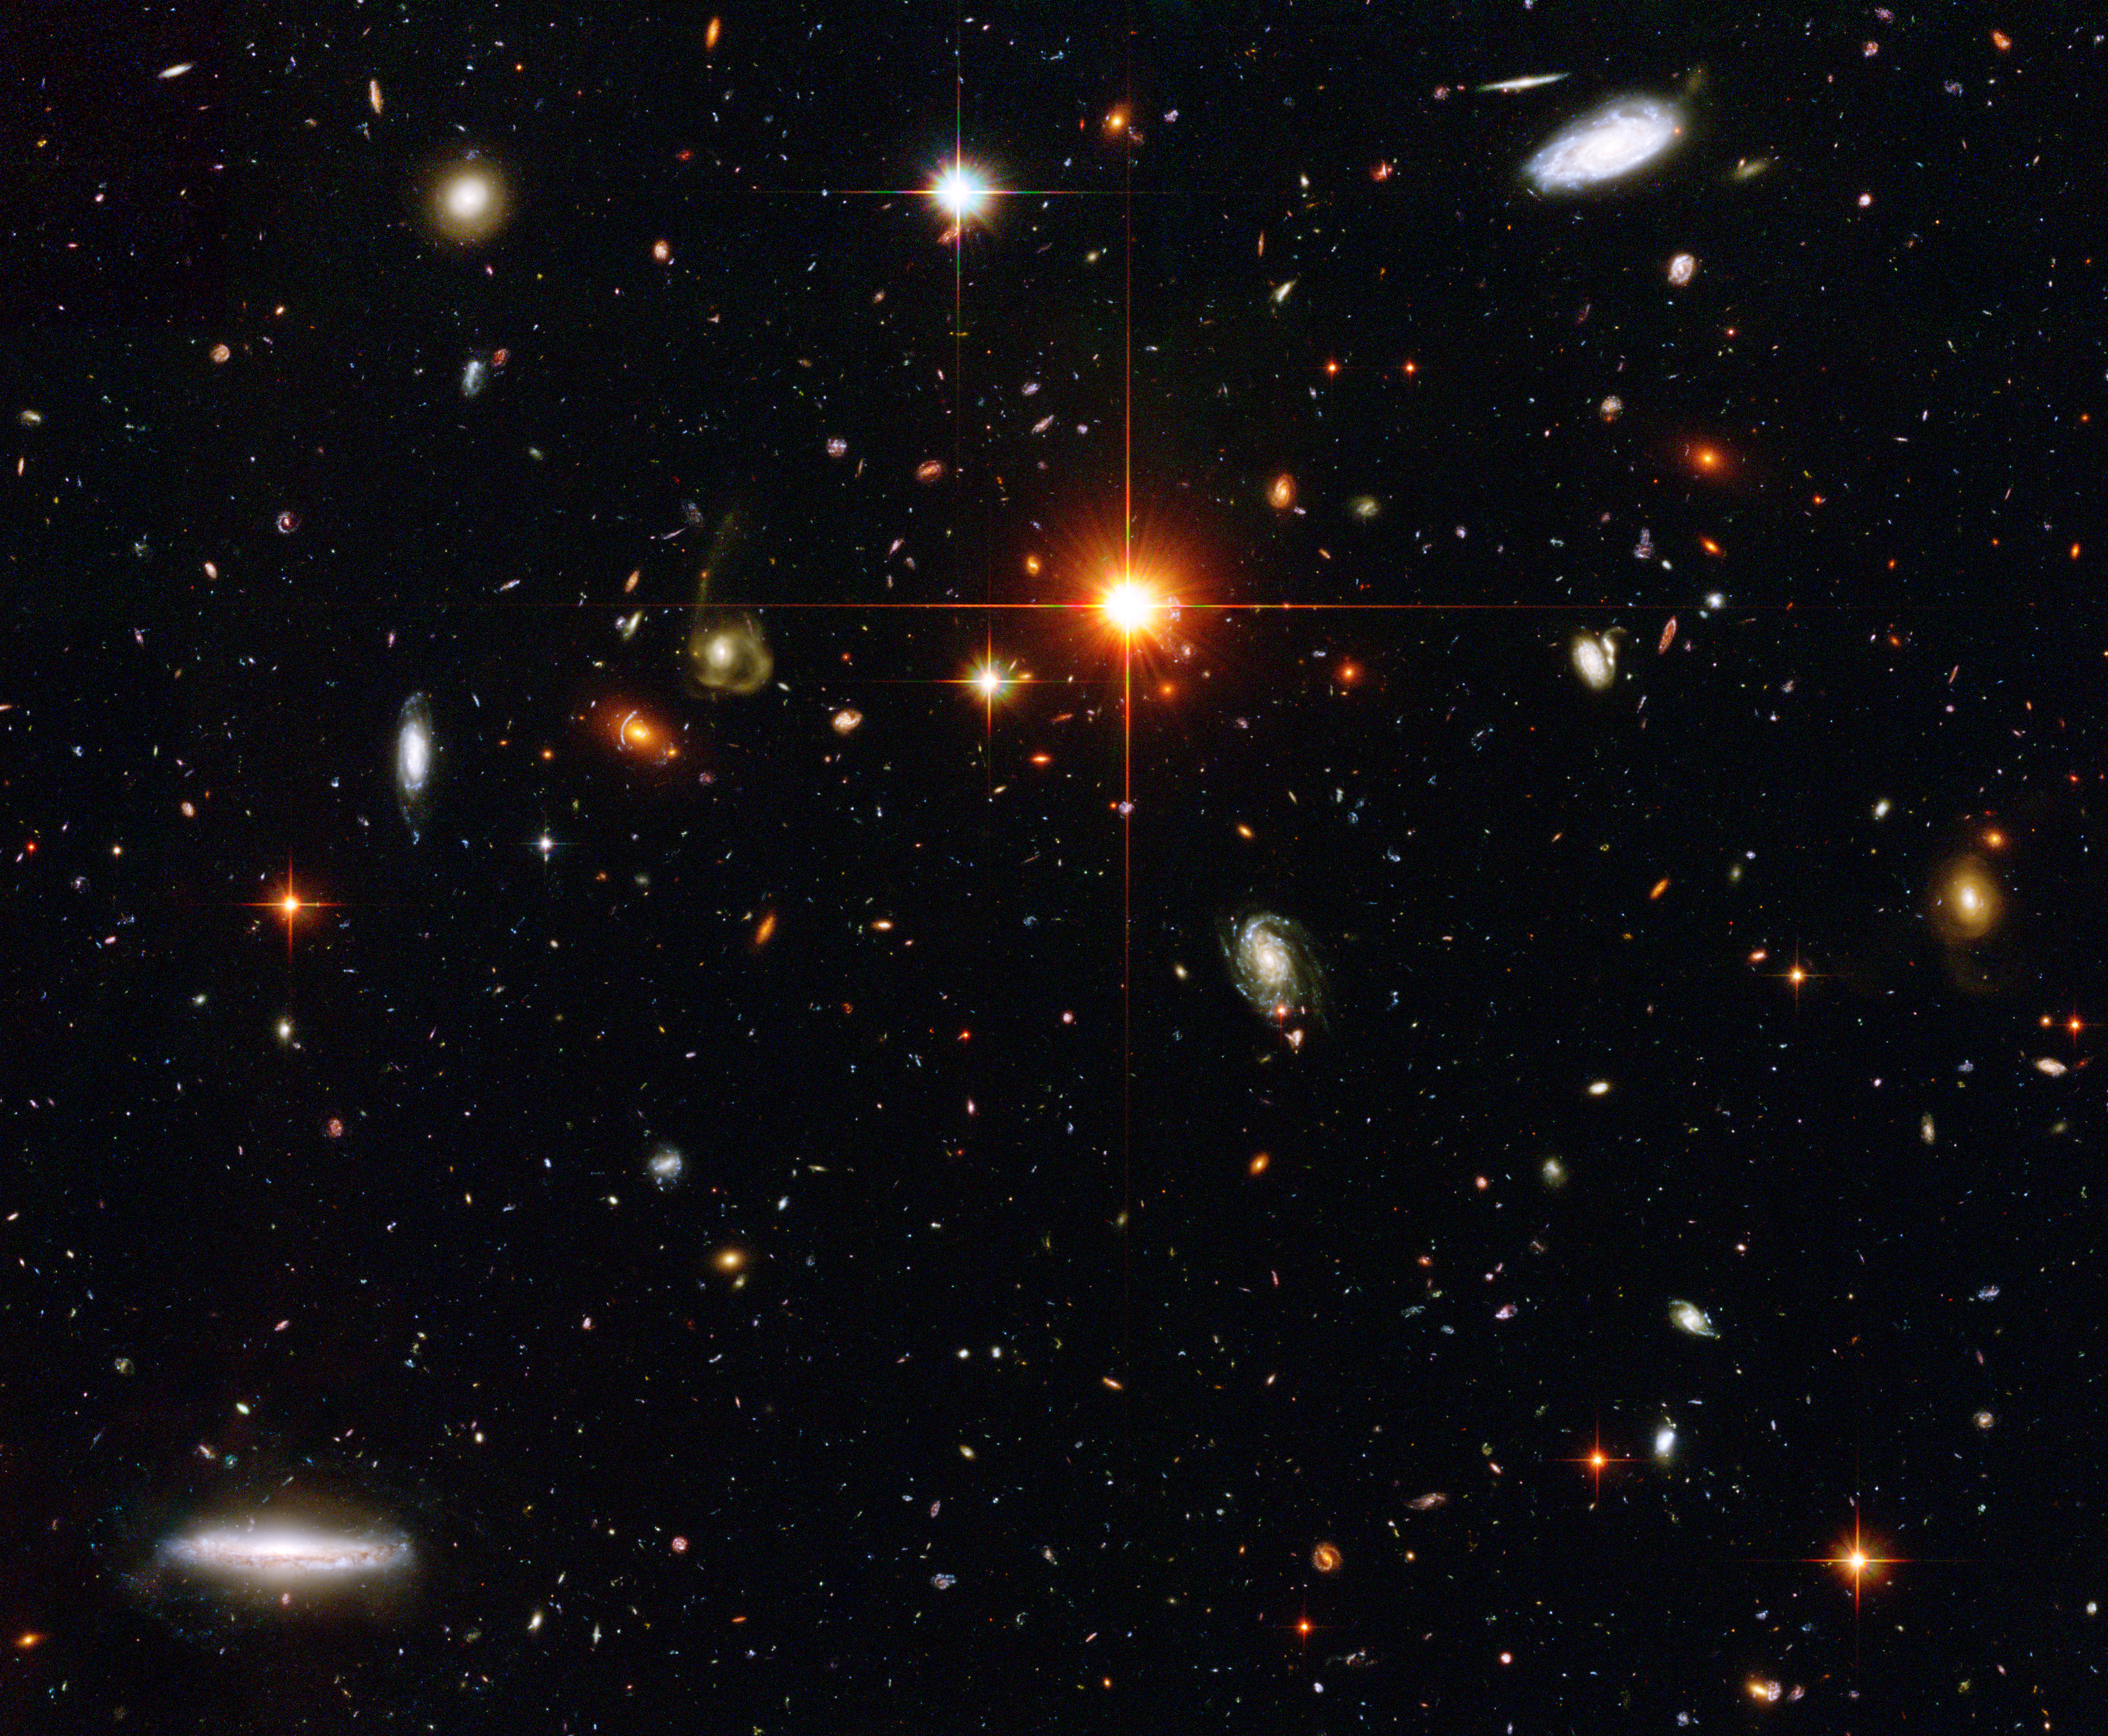

Hubble Spies a Zoo of Galaxies

Gazing deep into the universe, NASA/ESA Hubble Space Telescope has spied a menagerie of galaxies. Located within the same tiny region of space, these numerous galaxies display an assortment of unique characteristics. Some are big; some are small. A few are relatively nearby, but most are far away. Hundreds of these faint galaxies have never been seen before until their light was captured by Hubble.

Credit: NASA, ESA and The Hubble Heritage Team STScI/AURA)